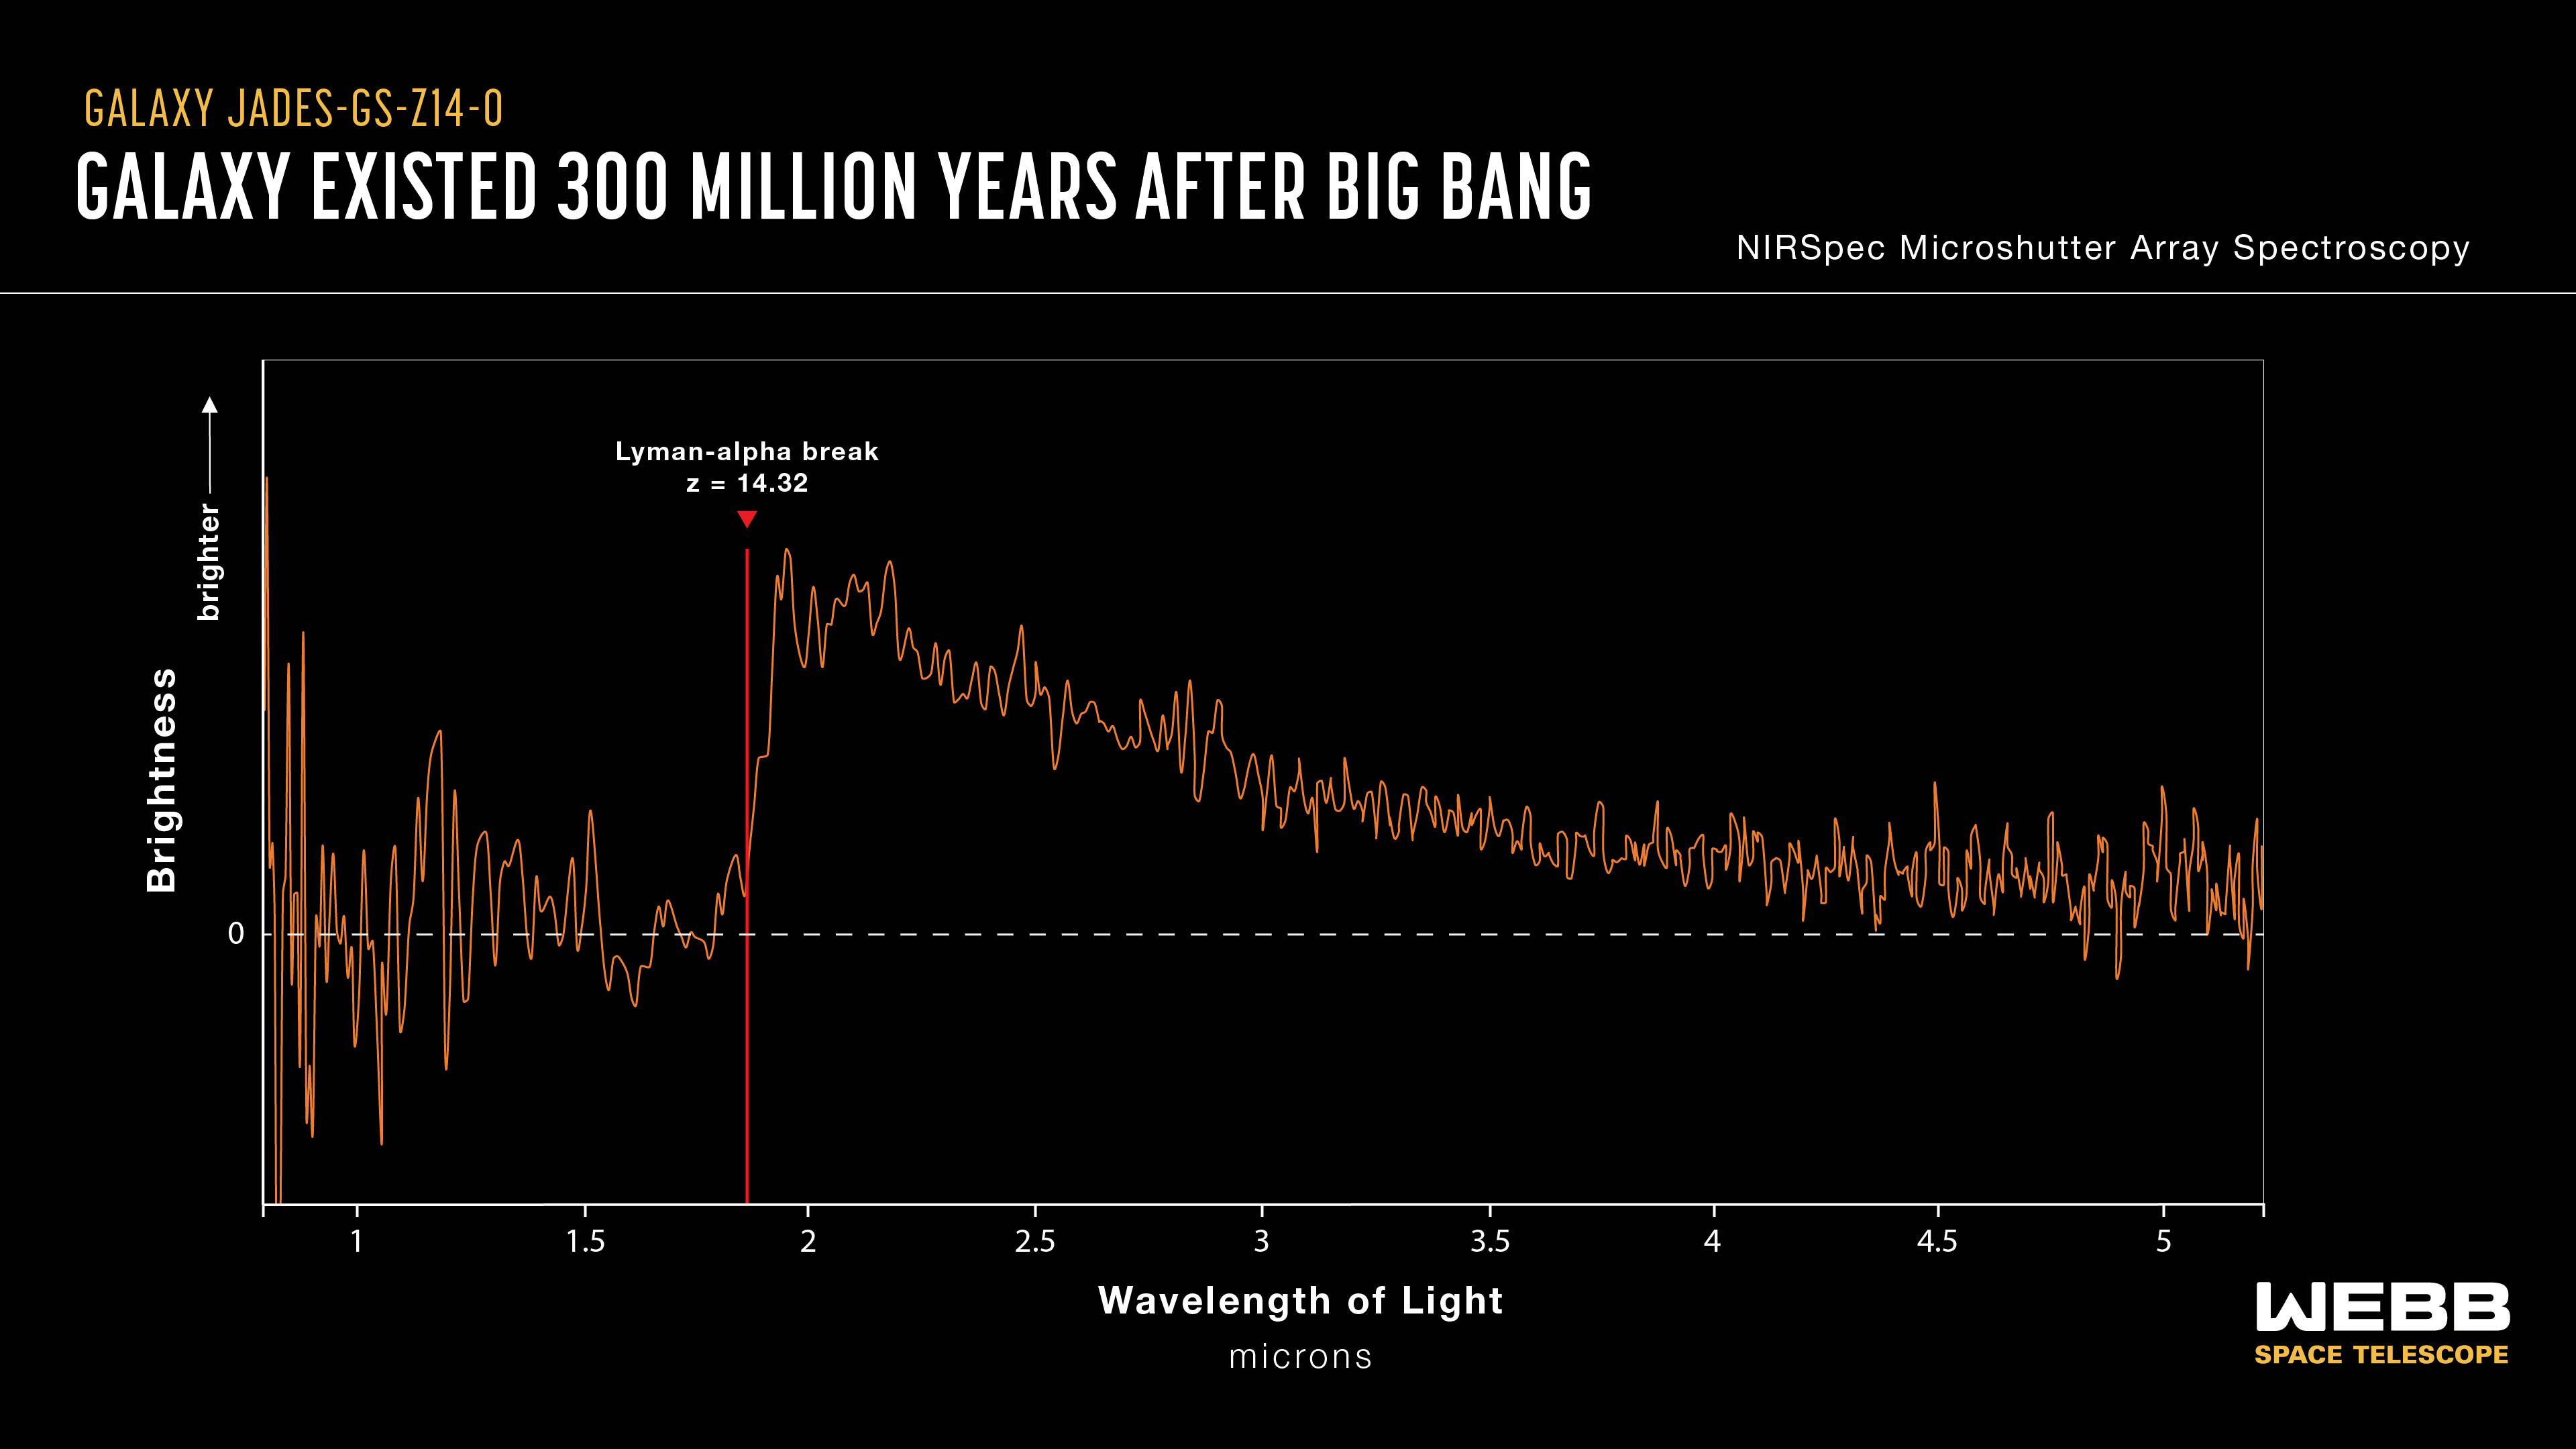

Webb finds most distant known galaxy

Using the NASA/ESA/CSA James Webb Space Telescope, scientists have found a record-breaking galaxy observed only 290 million years after the big bang.

Note: This post highlights data from Webb science in progress, which has not yet been through the peer-review process.

Over the last two years, scientists have used the NASA/ESA/CSA James Webb Space Telescope to explore what astronomers refer to as Cosmic Dawn – the period in the first few hundred million years after the big bang where the first galaxies were born. These galaxies provide vital insight into the ways in which the gas, stars, and black holes were changing when the universe was very young. In October 2023 and January 2024, an international team of astronomers used Webb to observe galaxies as part of the JWST Advanced Deep Extragalactic Survey (JADES) programme.

Webb’s NIRSpec was used to obtain a spectrum of the distant galaxy JADES-GS-z14-0 in order to accurately measure its redshift and therefore determine its age. The redshift (14) can be determined from the location of a critical wavelength known as the Lyman break. This galaxy dates back to less than 300 million years after the big bang.

These spectroscopic observations were taken as part of Guaranteed Time Observations (GTO) programme 1287, and the accompanying MIRI data as part of GTO programme 1180.

Learn more about these results here.

Credit: NASA, ESA, CSA, J. Olmsted (STScI), S. Carniani (Scuola Normale Superiore), JADES Collaboration